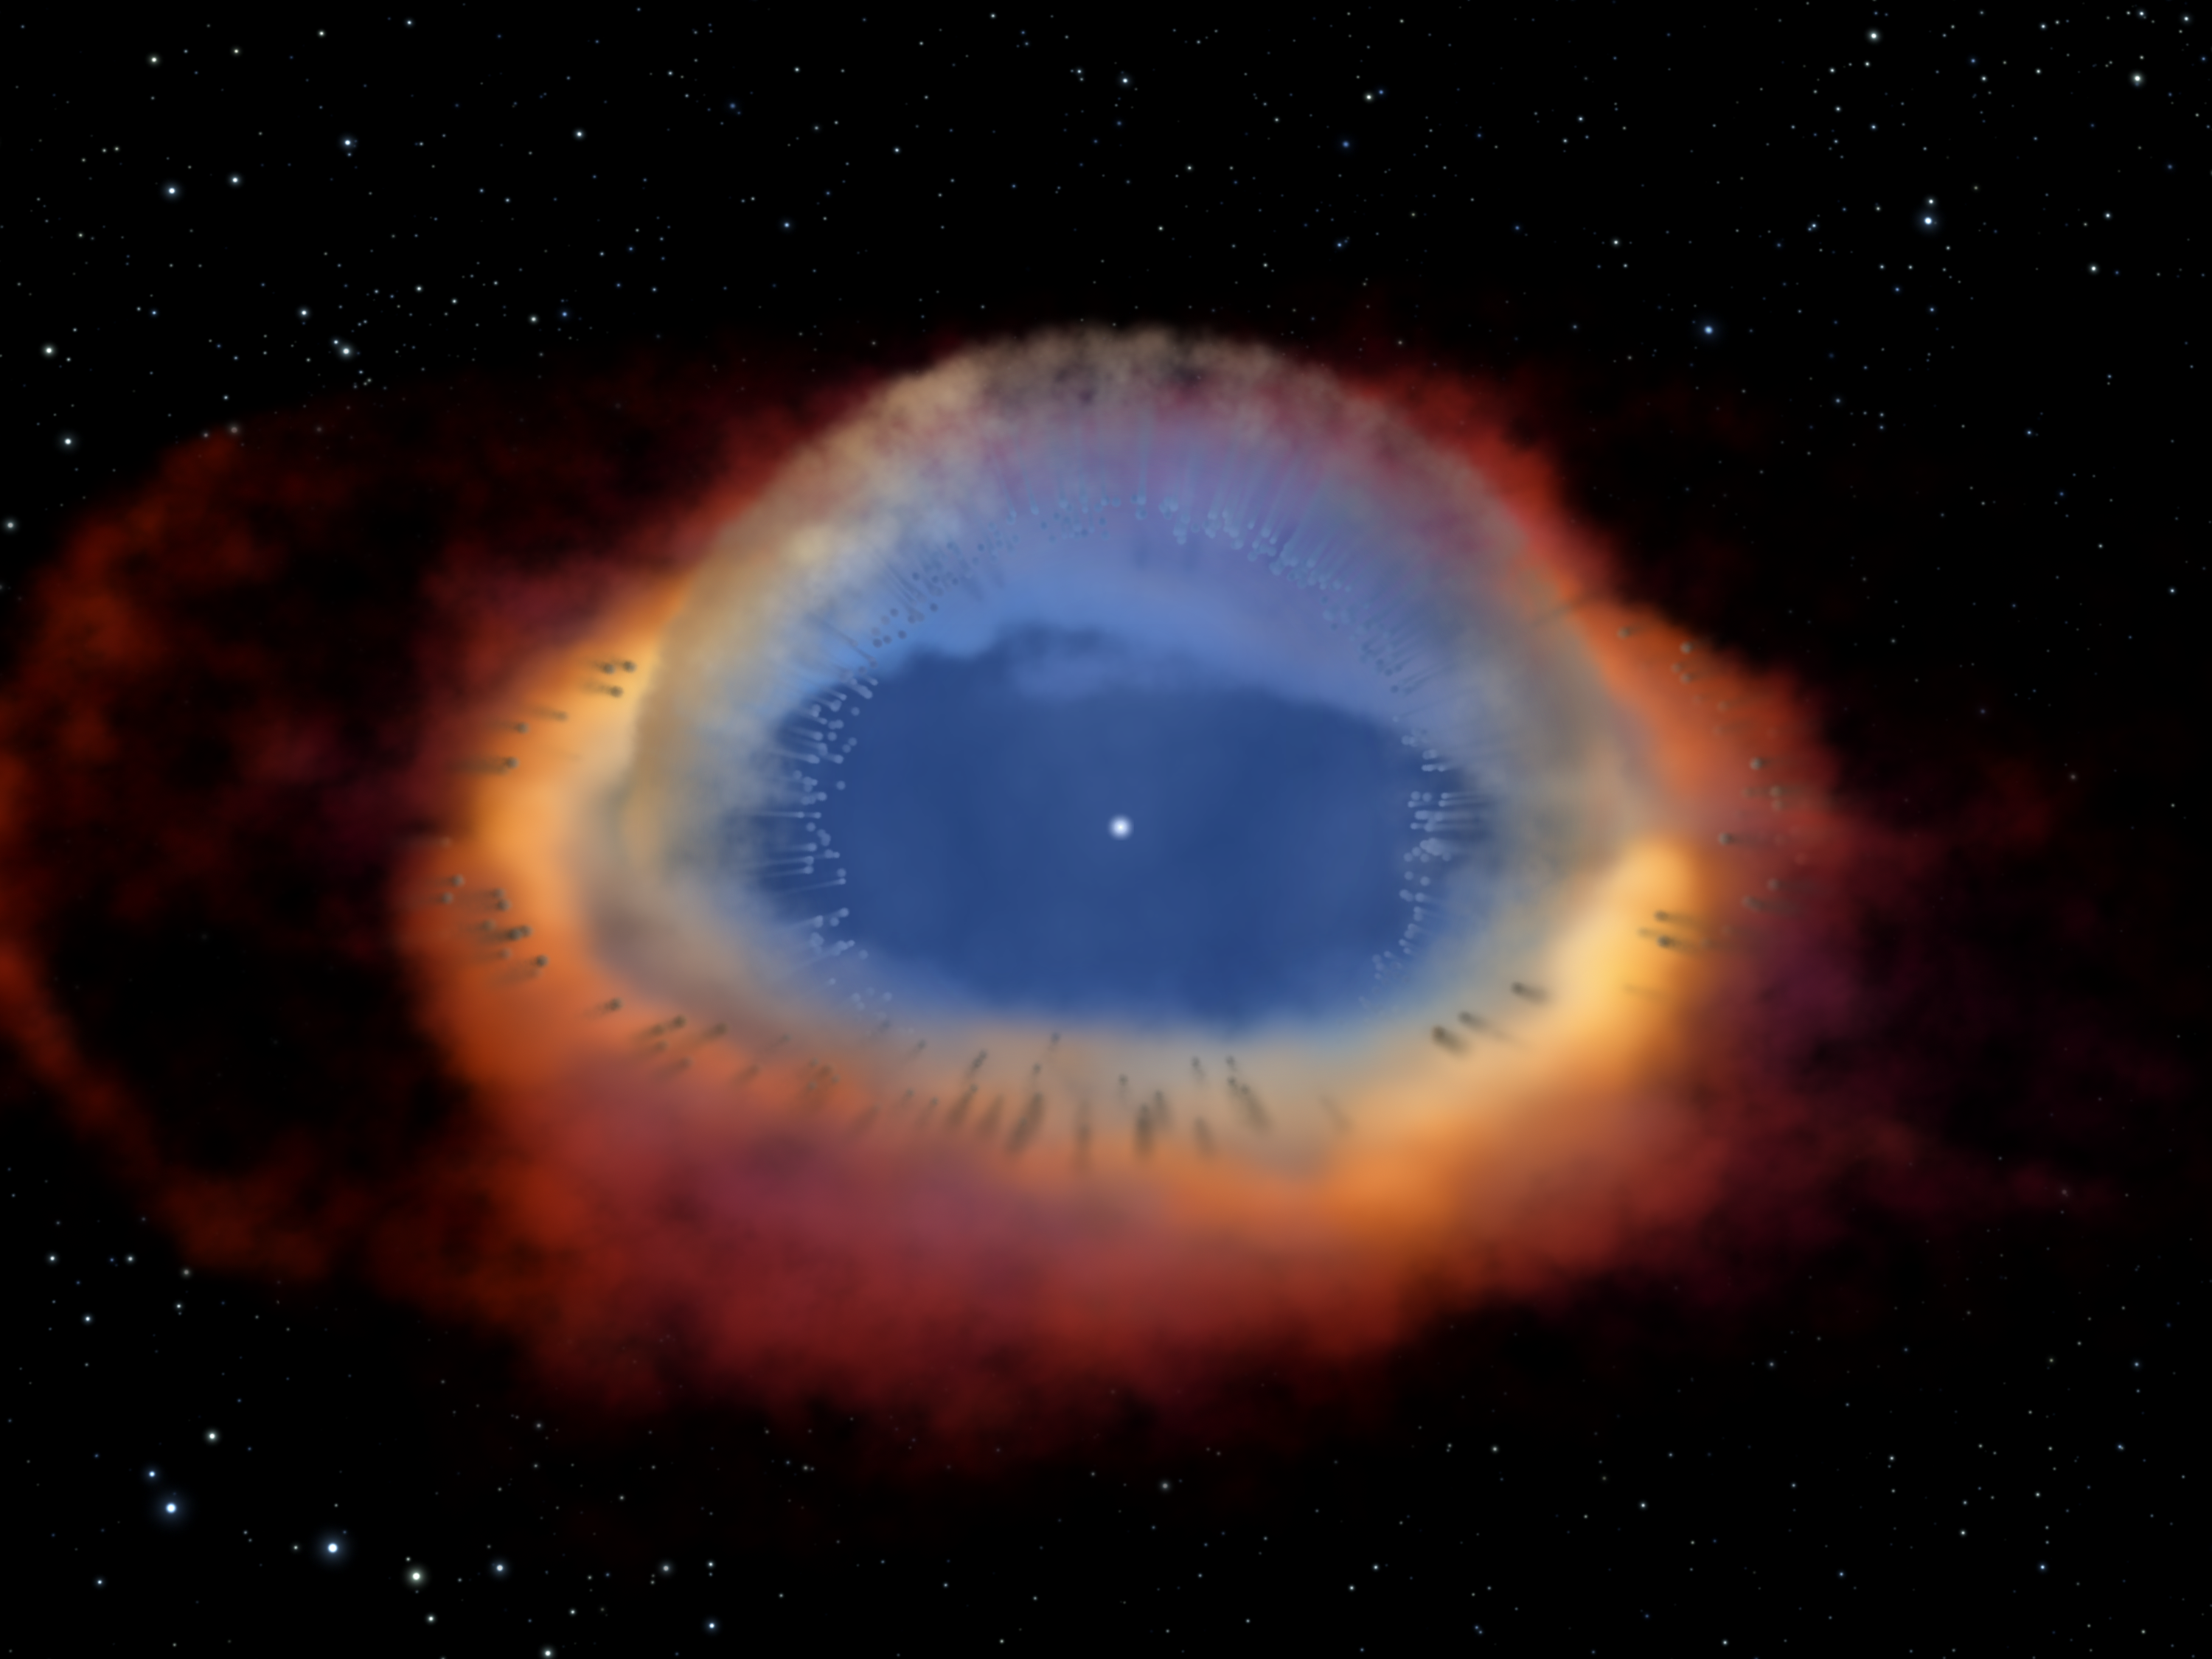

Helix Nebula model (artist's impression)

Looks can be deceiving, especially when it comes to celestial objects like galaxies and nebulas. These objects are so far away that astronomers cannot see their three-dimensional structure.

Credit: NASA, ESA, C.R. O'Dell (Vanderbilt University), and M. Meixner, P. McCullough, and G. Bacon ( Space Telescope Science Institute)